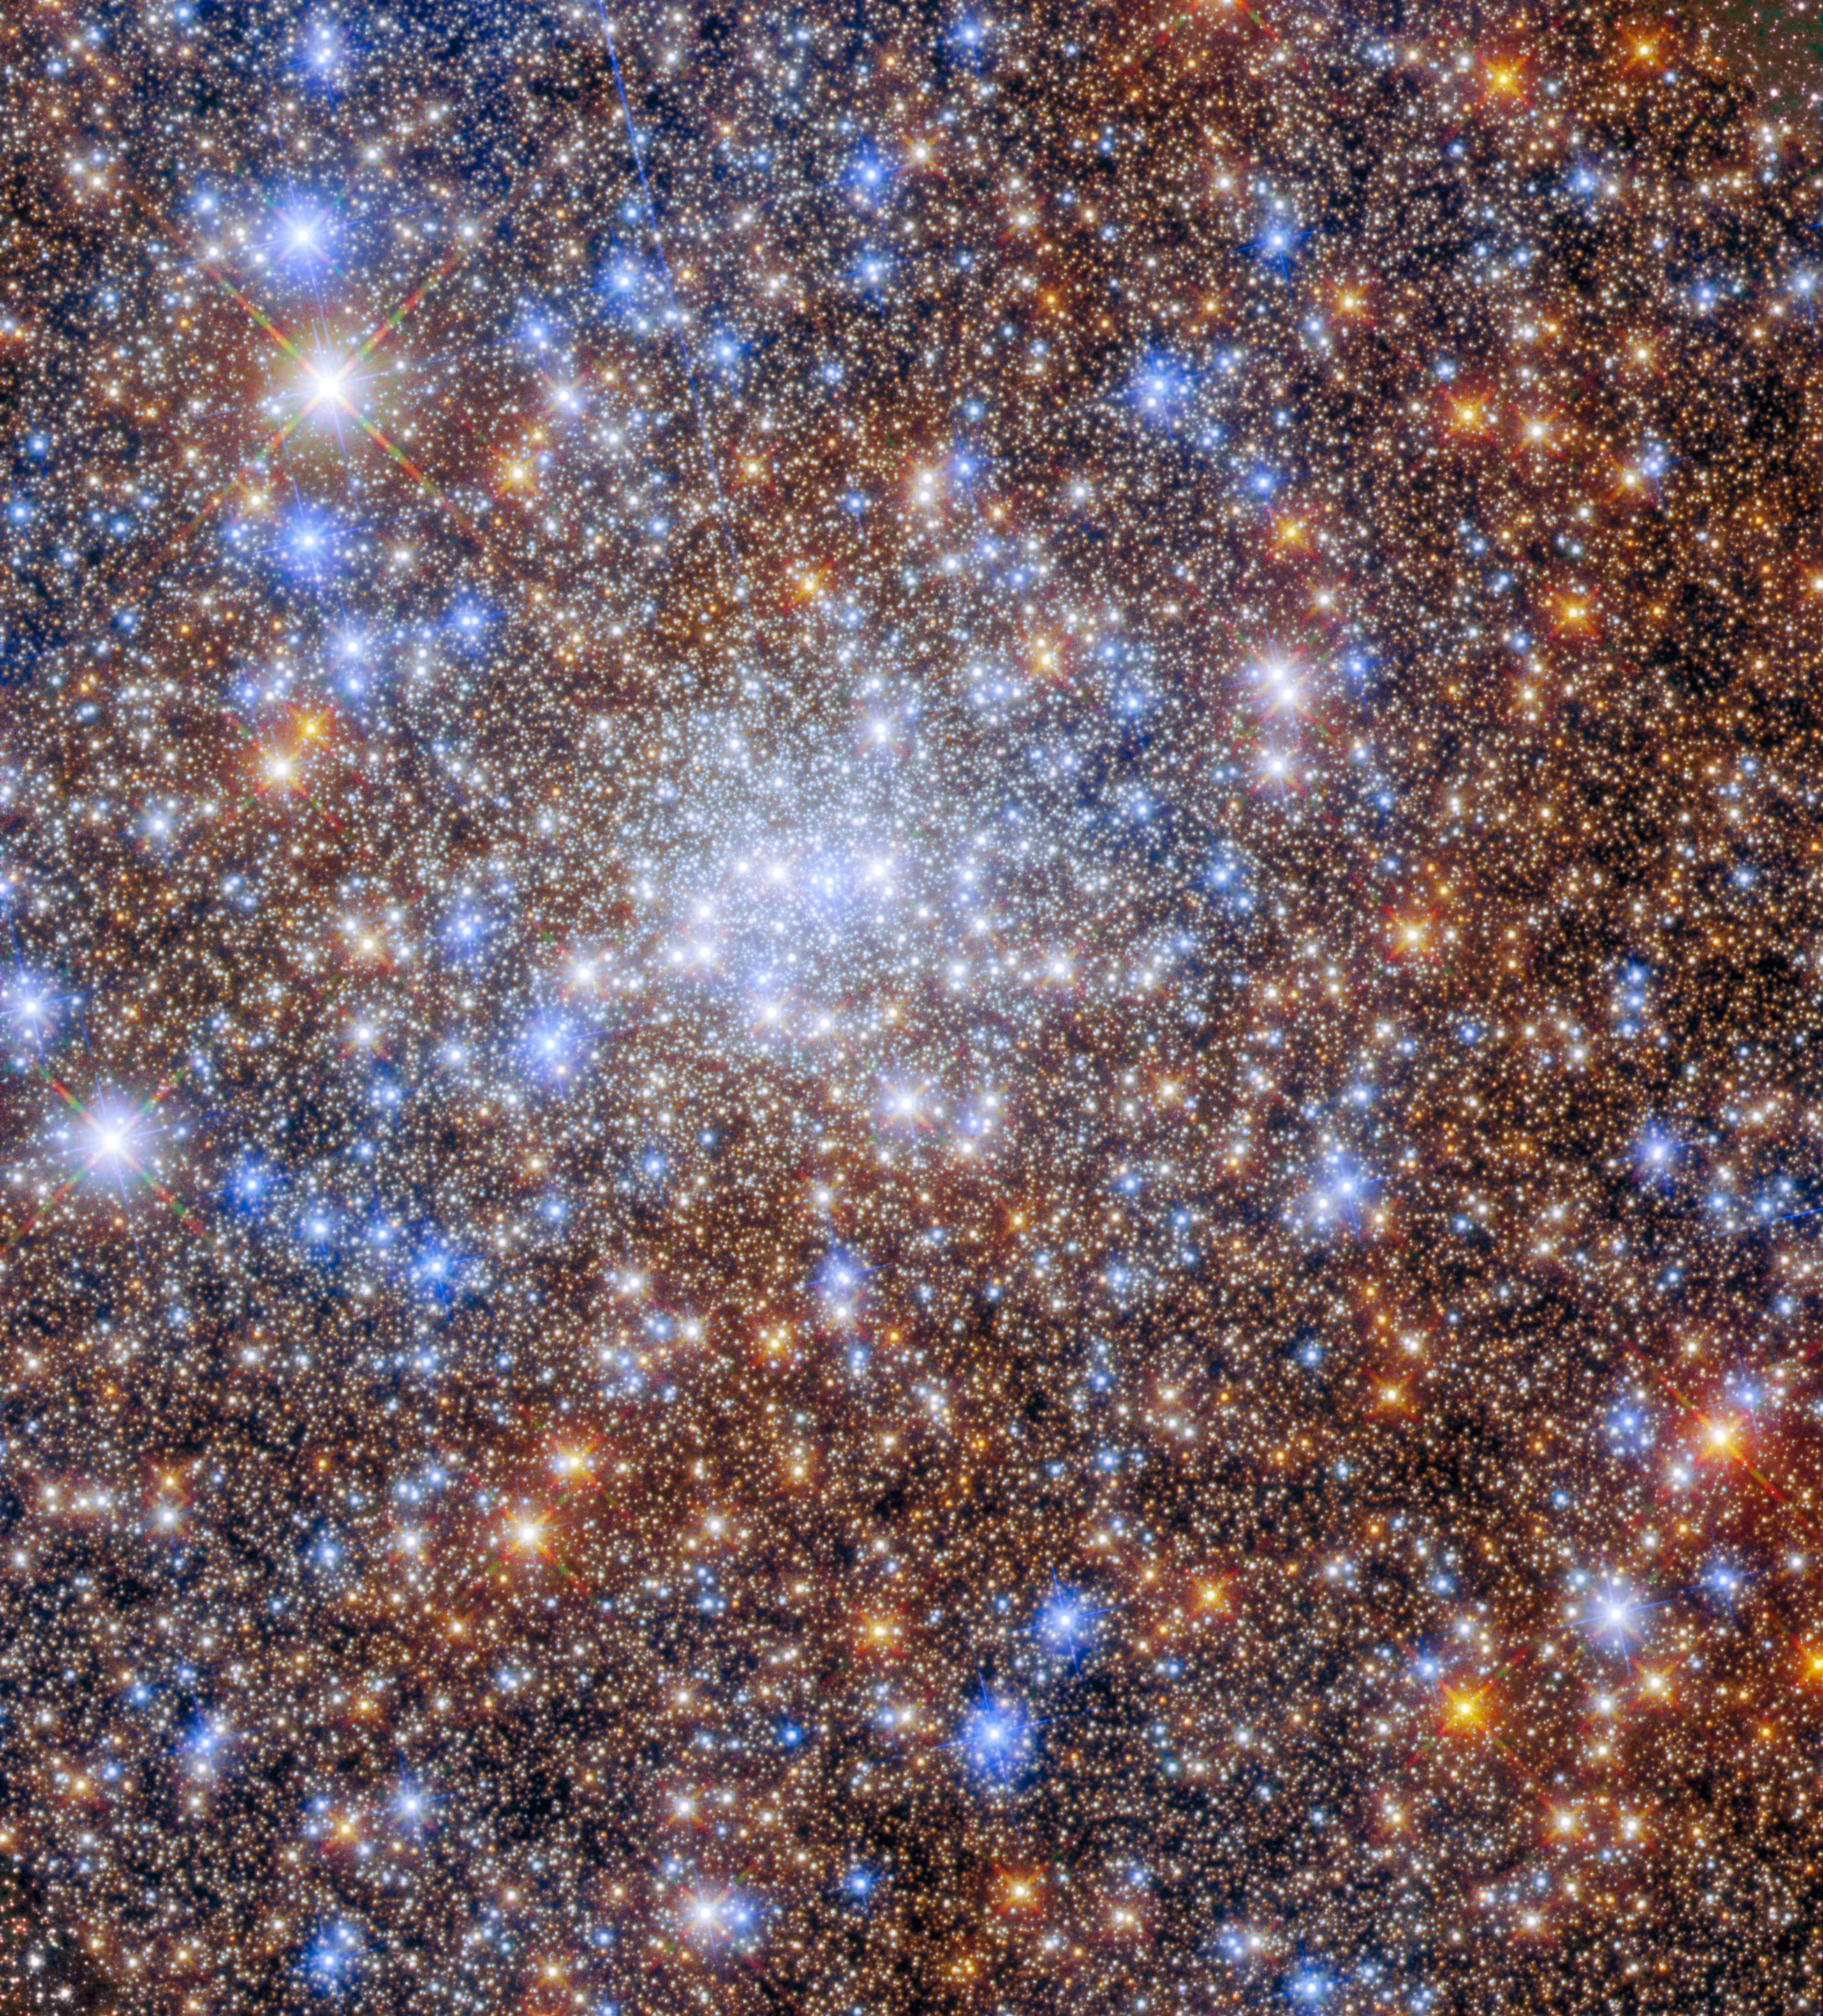

Starstruck in Terzan 4

A glittering multitude of stars in the globular cluster Terzan 4 fill this image from the NASA/ESA Hubble Space Telescope. Globular clusters are collections of stars bound together by their mutual gravitational attraction, and can contain millions of individual stars. As this image shows, the heart of a globular cluster such as Terzan 4 is a densely packed, crowded field of stars — which makes for spectacular images!

The launch of Hubble in 1990 revolutionised the study of globular clusters. The individual stars in these dense crowds are almost impossible to distinguish from one another with ground-based telescopes, but can be picked apart using space telescopes. Astronomers have taken advantage of Hubble’s crystal-clear vision to study the stars making up globular clusters, as well as how these systems change over time.

This particular observation comes from astronomers using Hubble to explore Terzan 4 and other globular clusters to understand the shape, density, age, and structure of globular clusters close to the centre of the Milky Way. Unlike globular clusters elsewhere in the sky, these globular clusters have evaded detailed observation because of the clouds of gas and dust swirling around the galactic core. These clouds blot out starlight in a process that astronomers refer to as ‘extinction’, and complicate astronomical observations.

Astronomers took advantage of the sensitivity of two of Hubble’s instruments — the Advanced Camera for Surveys and Wide Field Camera 3 — to overcome the impact of extinction on Terzan 4. By combining Hubble imagery with sophisticated data processing, astronomers were able to determine the ages of galactic globular clusters to within a billion years — a relatively accurate measurement in astronomical terms!

Credit: ESA/Hubble & NASA, R. Cohen